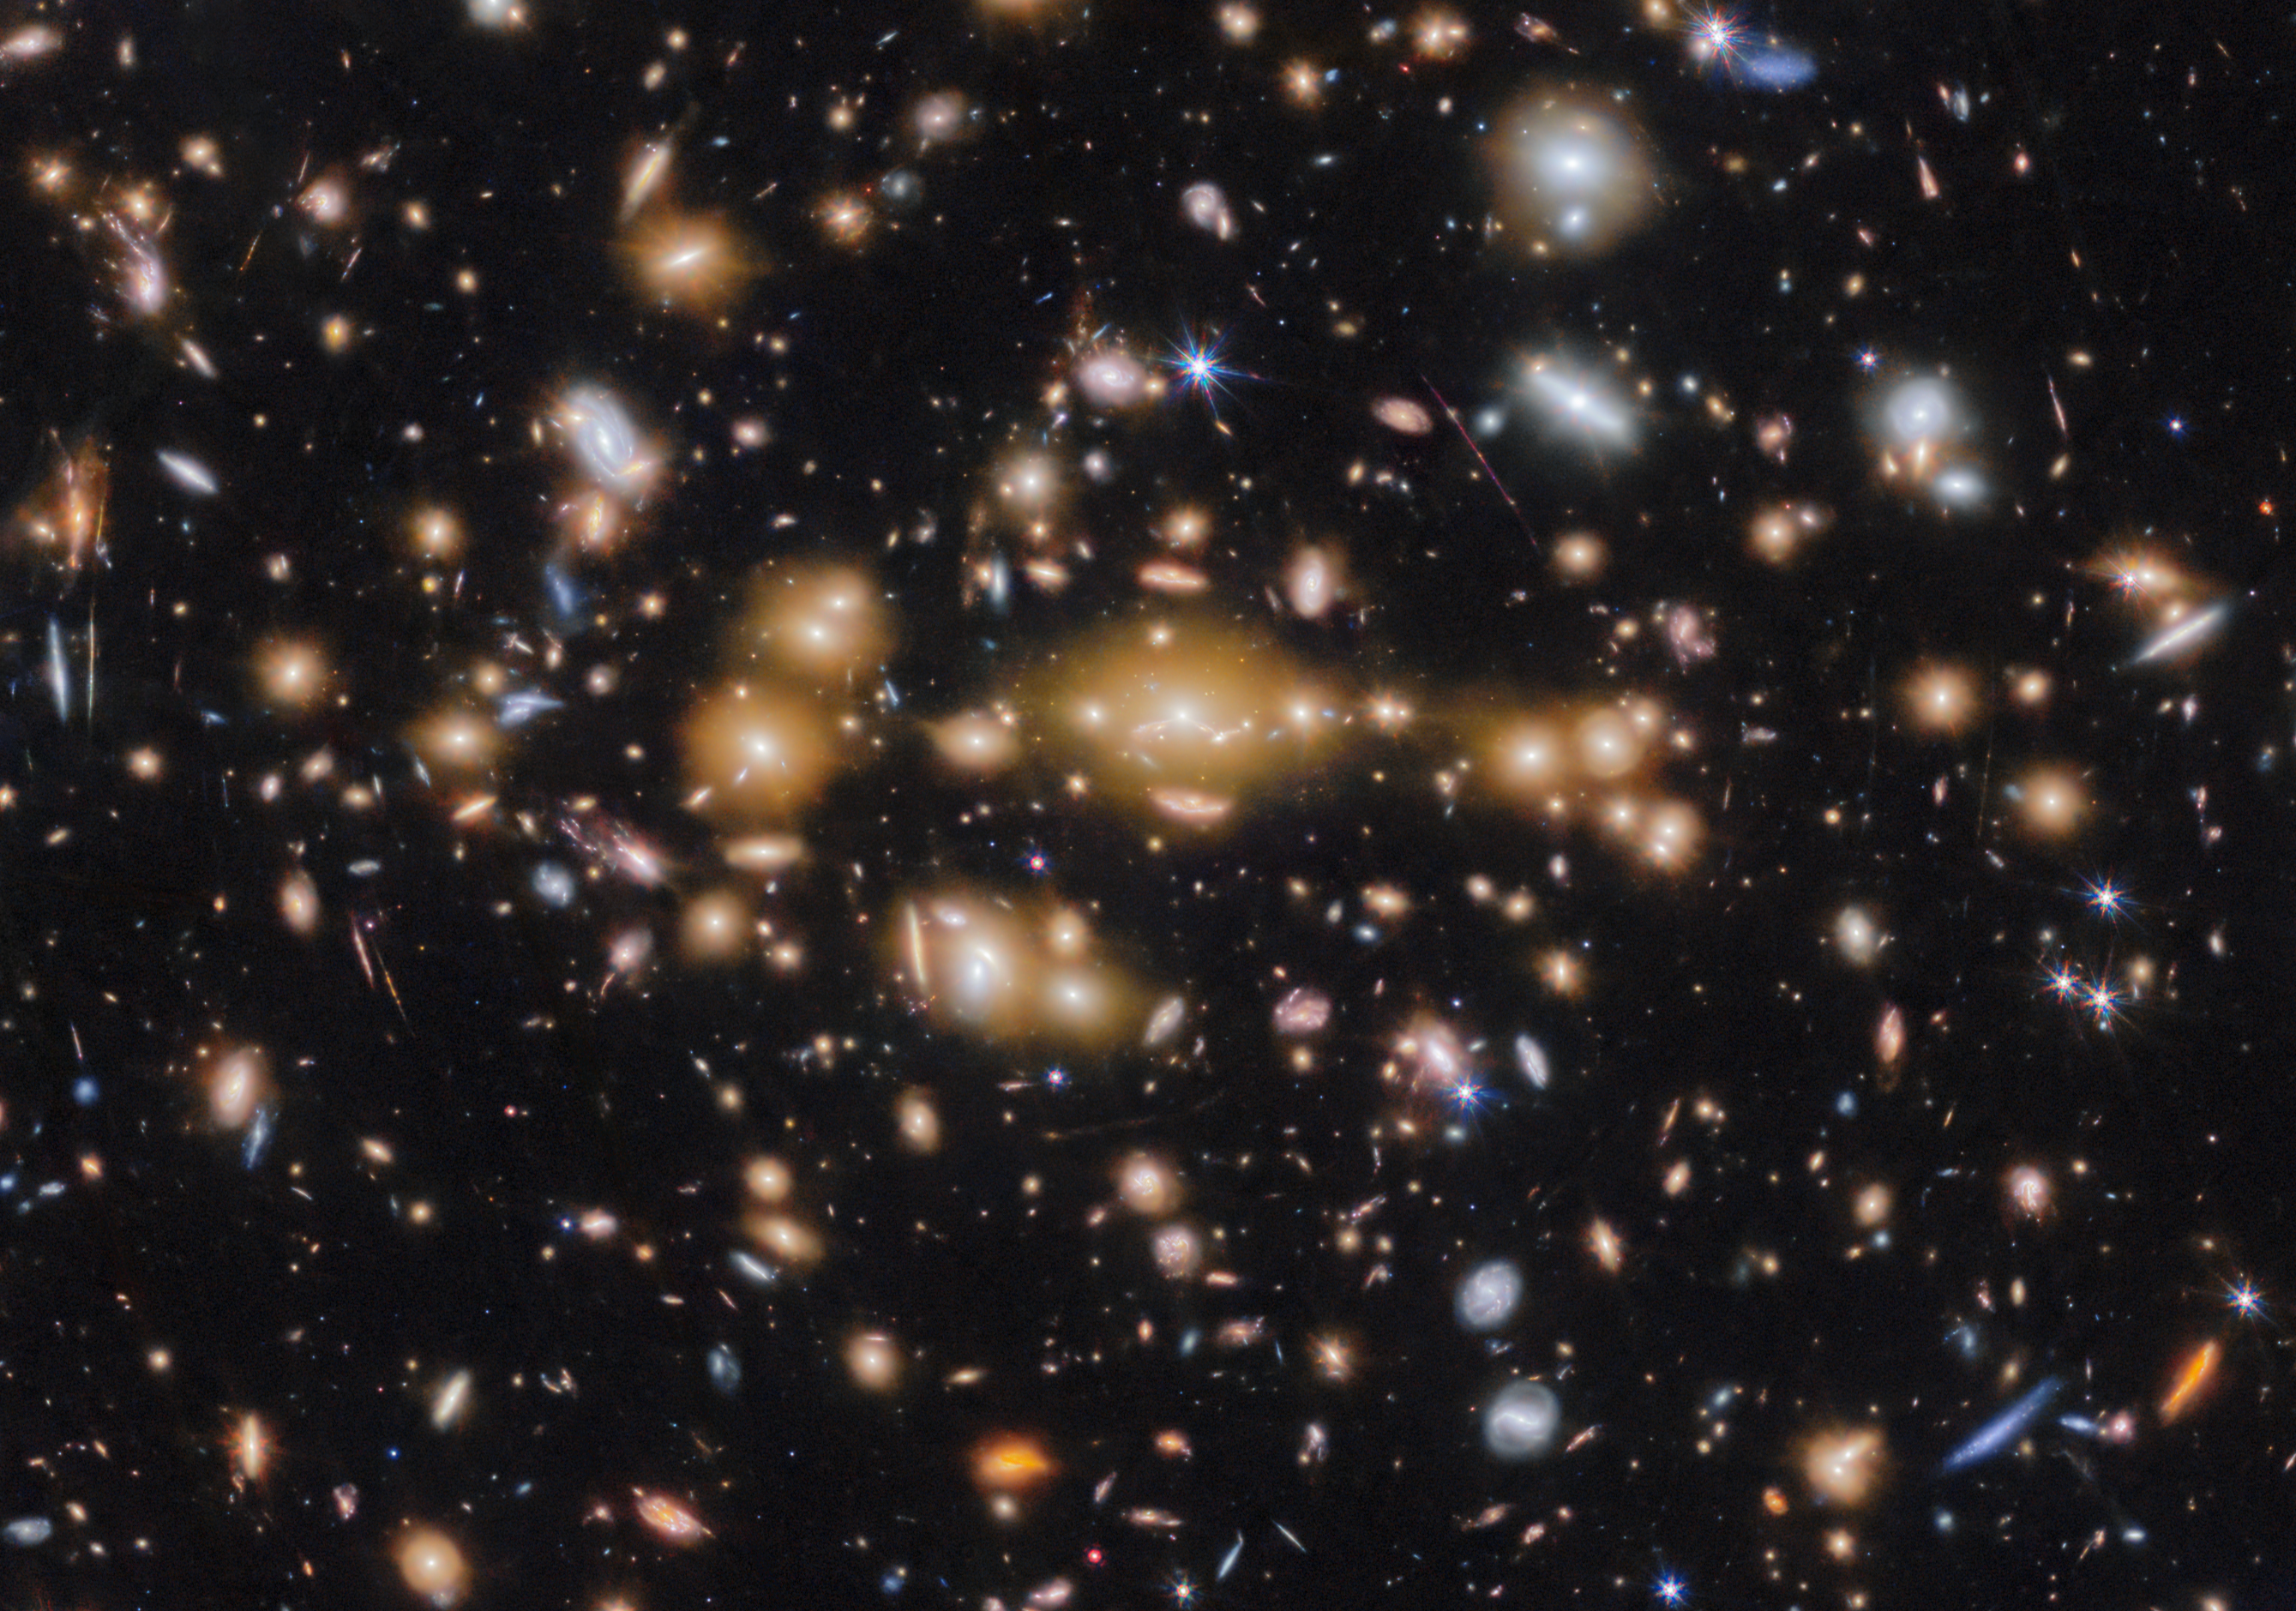

Galaxy cluster SPT-CL J0615−5746 (cropped)

An international team of astronomers have used the NASA/ESA/CSA James Webb Space Telescope to discover gravitationally bound star clusters when the Universe was 460 million years old. This is the first discovery of star clusters in an infant galaxy less than 500 million years after the Big bang.

Young galaxies in the early Universe underwent significant burst phases of star formation, generating substantial amounts of ionising radiation. However, because of their cosmological distances, direct studies of their stellar content have proven challenging. Using Webb, an international team of astronomers have now detected five young massive star clusters in the Cosmic Gems arc (SPT0615-JD1), a strongly-lensed galaxy emitting light when the Universe was roughly 460 million years old, looking back across 97% of cosmic time.

The Cosmic Gems arc was initially discovered in NASA/ESA Hubble Space Telescope images obtained by the RELICS (Reionization Lensing Cluster Survey) programme of the lensing galaxy cluster SPT-CL J0615−5746.

With Webb, the science team can now see where stars formed and how they are distributed, in a similar way to how the Hubble Space Telescope is used to study local galaxies. Webb’s view provides a unique opportunity to study star formation and the inner workings of infant galaxies at such an unprecedented distance.

Credit: ESA/Webb, NASA & CSA, L. Bradley (STScI), A. Adamo (Stockholm University) and the Cosmic Spring collaboration